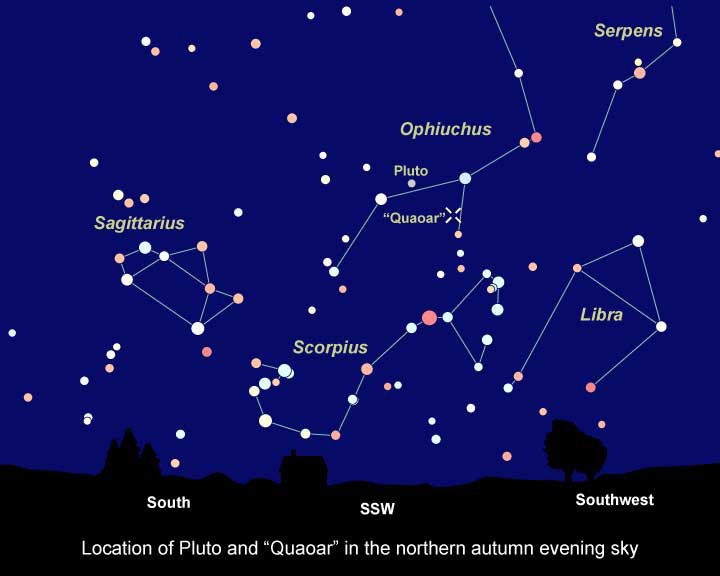

Sky chart showing location of KBO "quaoar"

Approximately half the size of Pluto, the icy world 2002 LM60, dubbed "Quaoar" (pronounced kwa-whar) by its discoverers, is the farthest object in the solar system ever to be resolved by a telescope.

Credit: NASA/ESA and Z. Levay (STScI)